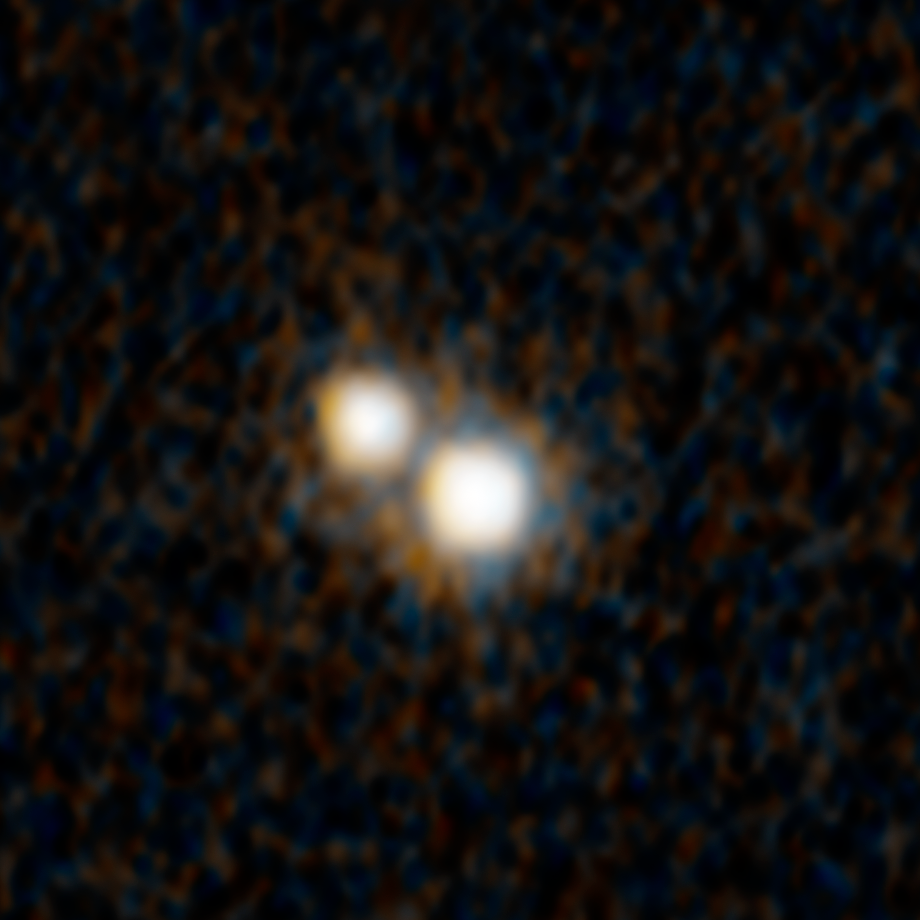

Hubble unexpectedly finds double quasar in distant Universe

This image from the NASA/ESA Hubble Space Telescope shows a pair of quasars (known as J0749+2255) that existed when the Universe was just 3 billion years old. They are embedded inside a pair of colliding galaxies. The quasars are separated by less than the size of a single galaxy. Quasars are powered by voracious, supermassive black holes blasting out ferocious fountains of energy as they engorge themselves on gas, dust, and anything else within their gravitational grasp. The black holes will eventually merge.

This discovery required the combined power of the NASA/ESA Hubble Space Telescope and the W.M. Keck Observatories in Hawaii. Multi-wavelength observations from the International Gemini Observatory in Hawaii, NSF's Karl G. Jansky Very Large Array in New Mexico, and NASA's Chandra X-ray Observatory also contributed to understanding the dynamic duo. And, ESA's Gaia space observatory helped identify this double quasar in the first place.

Hubble shows, unequivocally, that this is indeed a genuine pair of supermassive black holes, rather than two images of the same quasar created by a foreground gravitational lens. And, Hubble shows a tidal feature from the merging of two galaxies, where gravity distorts the shape of the galaxies forming two tails of stars.

However, Hubble's sharp resolution alone isn't good enough to go looking for these dual light beacons. Researchers enlisted Gaia, which launched in 2013, to pinpoint potential double-quasar candidates. Gaia measures the positions, distances, and motions of nearby celestial objects very precisely. But in a novel technique, it can be used to explore the distant universe. Gaia's huge database can be used to search for quasars that mimic the apparent motion of nearby stars. The quasars appear as single objects in the Gaia data because they are so close together. However, Gaia can pick up a subtle, unexpected "jiggle" that mimics an apparent change in position of some of the quasars it observes. In reality, the quasars aren't moving through space in any measurable way. Instead, their jiggle could be evidence of random fluctuations of light as each member of the quasar pair varies in brightness on timescales of days to months, depending on their black hole's feeding schedule. This alternating brightness between the quasar pair is similar to seeing a railroad crossing signal from a distance. As the lights on both sides of the stationary signal alternately flash, the sign gives the illusion of "jiggling."

Because Hubble peers into the distant past, this double quasar no longer exists. Over the intervening 10 billion years, their host galaxies have likely settled into a giant elliptical galaxy, like the ones seen in the local universe today. And, the quasars have merged to become a gargantuan, supermassive black hole at its centre. The nearby giant elliptical galaxy, M87, has a monstrous black hole weighing 6.5 billion times the mass of our Sun. Perhaps this black hole was grown from one or more galaxy mergers over the past billions of years.

These results are featured in the paper published on 5 April 2023 in the journal Nature.

Credit: NASA, ESA, Yu-Ching Chen (UIUC), Hsiang-Chih Hwang (IAS), Nadia Zakamska (JHU), Yue Shen (UIUC)